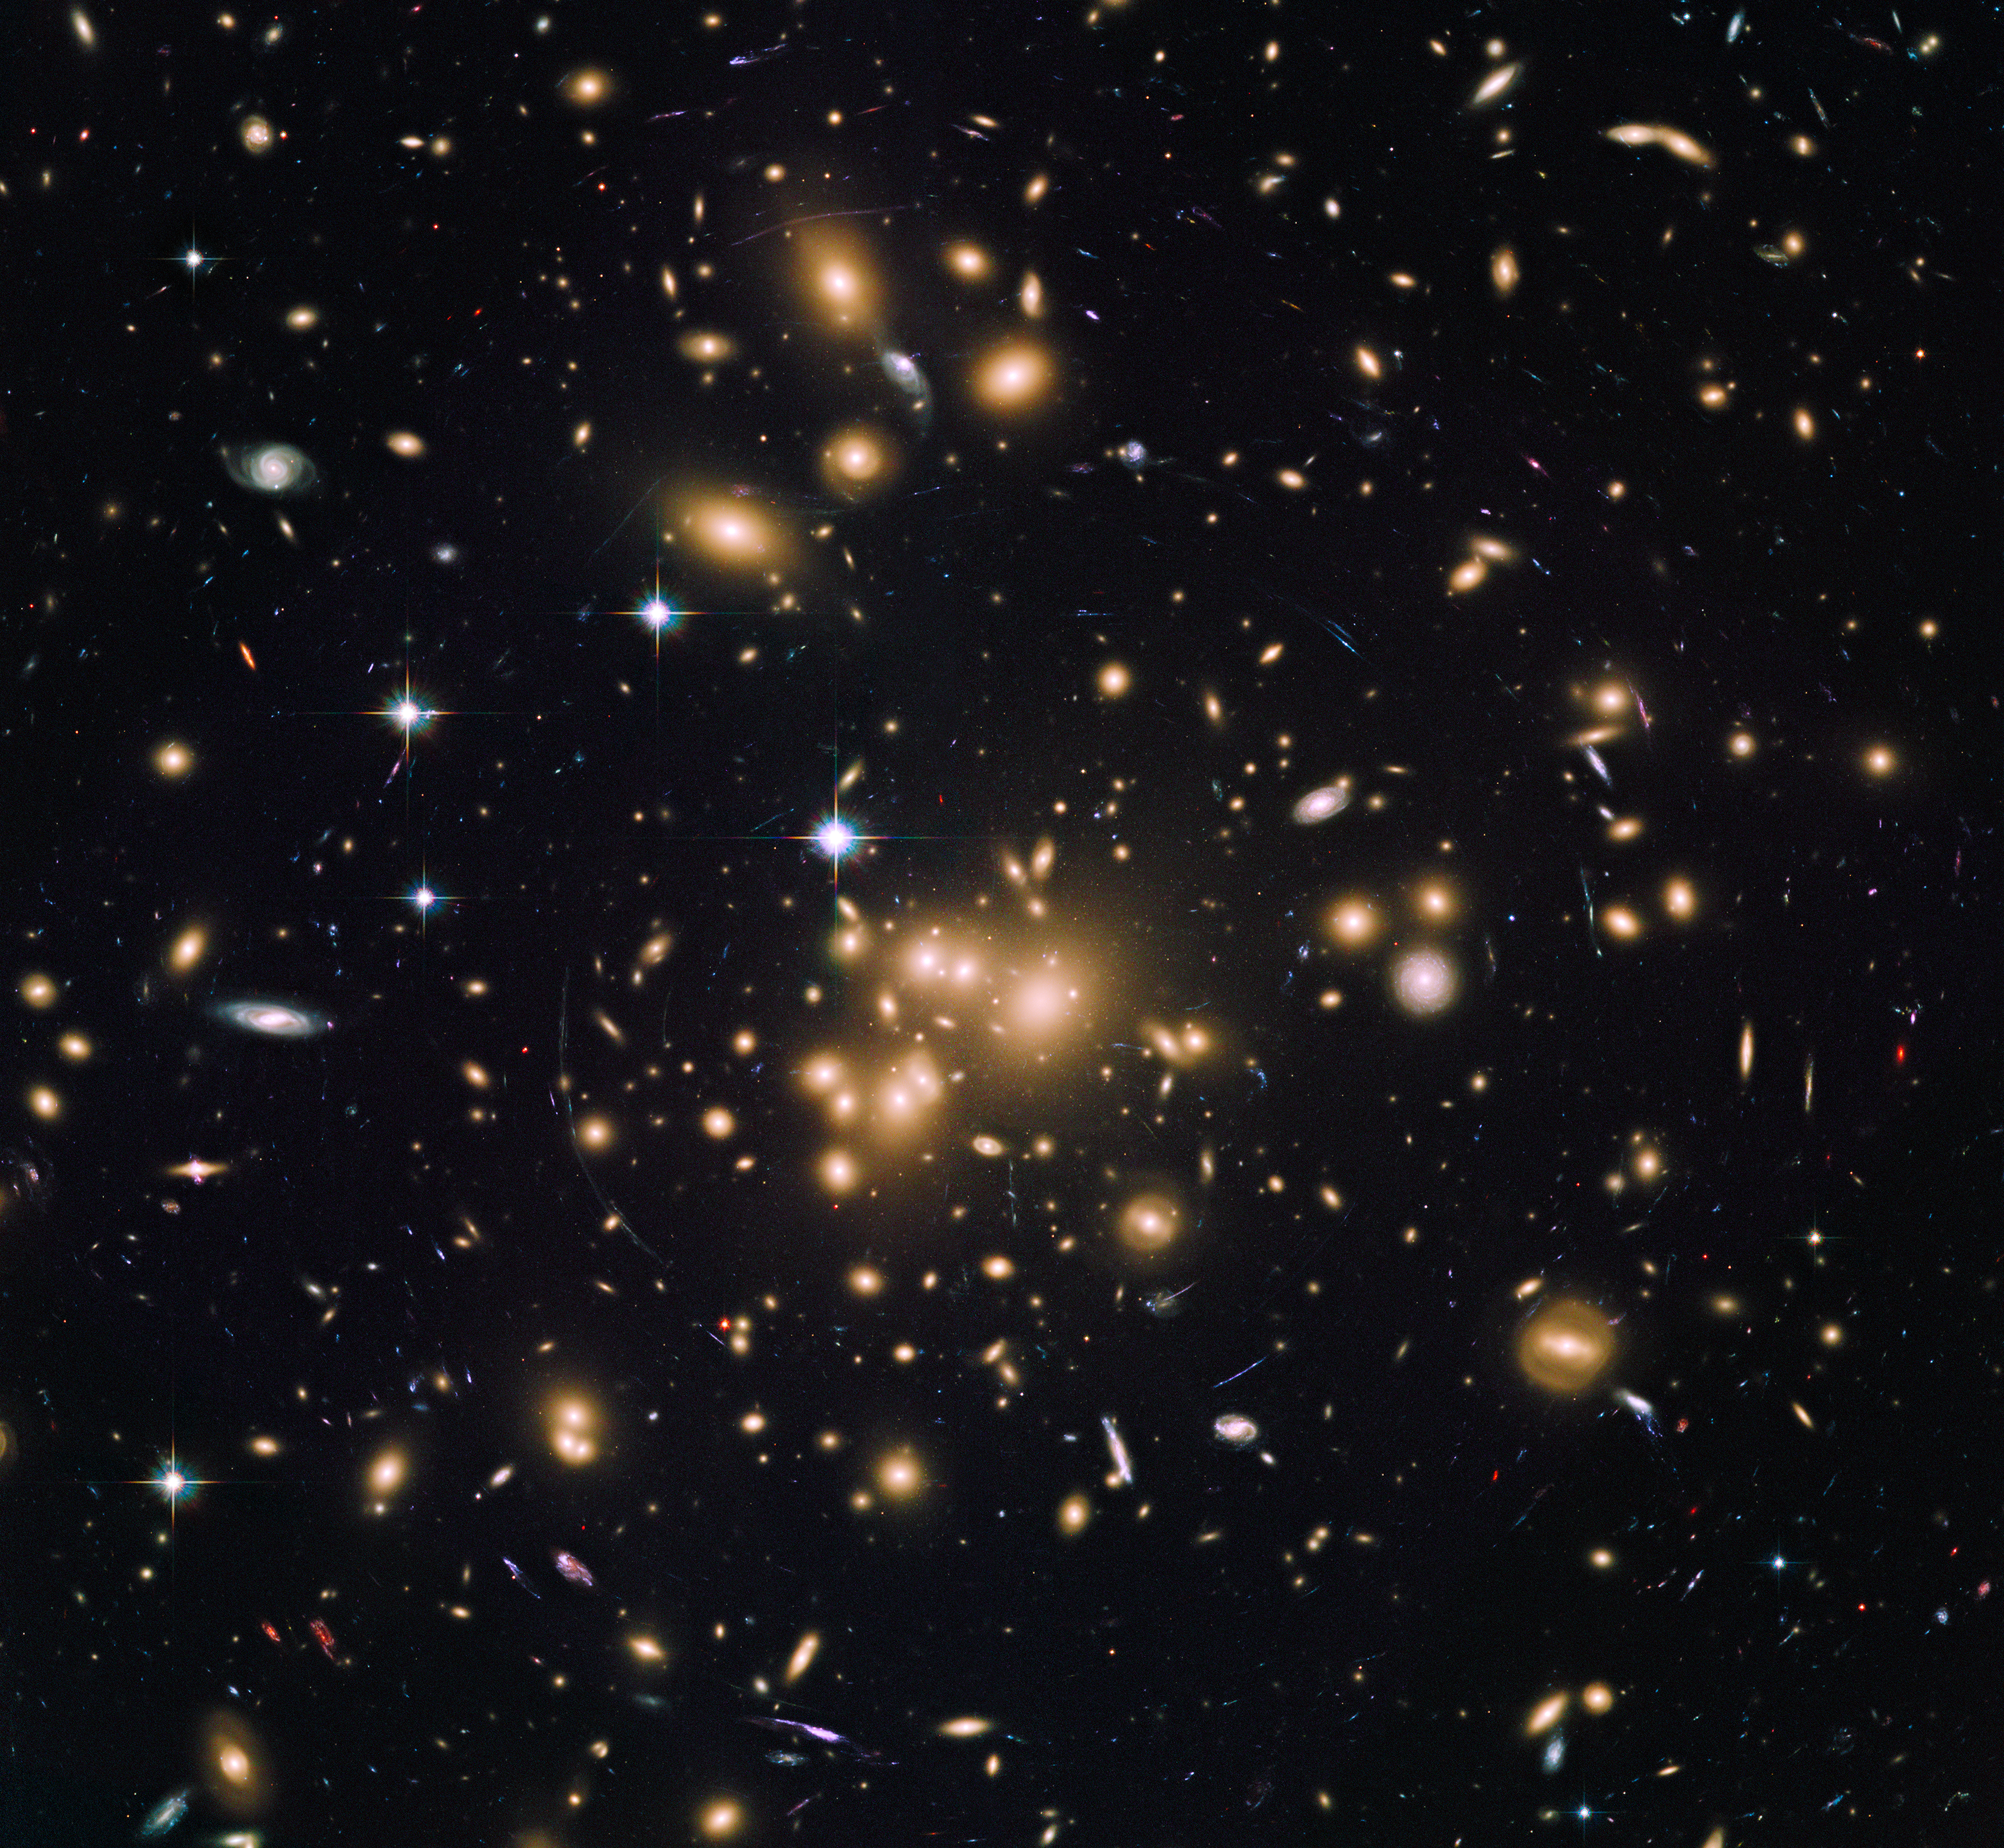

Galaxy cluster Abell 1689

This image shows galaxy cluster Abell 1689. Astronomers have used the sharp eye of the NASA/ESA Hubble Space Telescope and the magnification power of this giant cluster to find 58 remote galaxies, which produced the bulk of new stars during the Universe's early years. They are the smallest, faintest, and most numerous galaxies ever seen in the remote Universe. This image is a blend of exposures taken by Hubble's Advanced Camera for Surveys and Wide Field Camera 3.

Credit: NASA, ESA, and B. Siana and A. Alavi (University of California, Riverside)